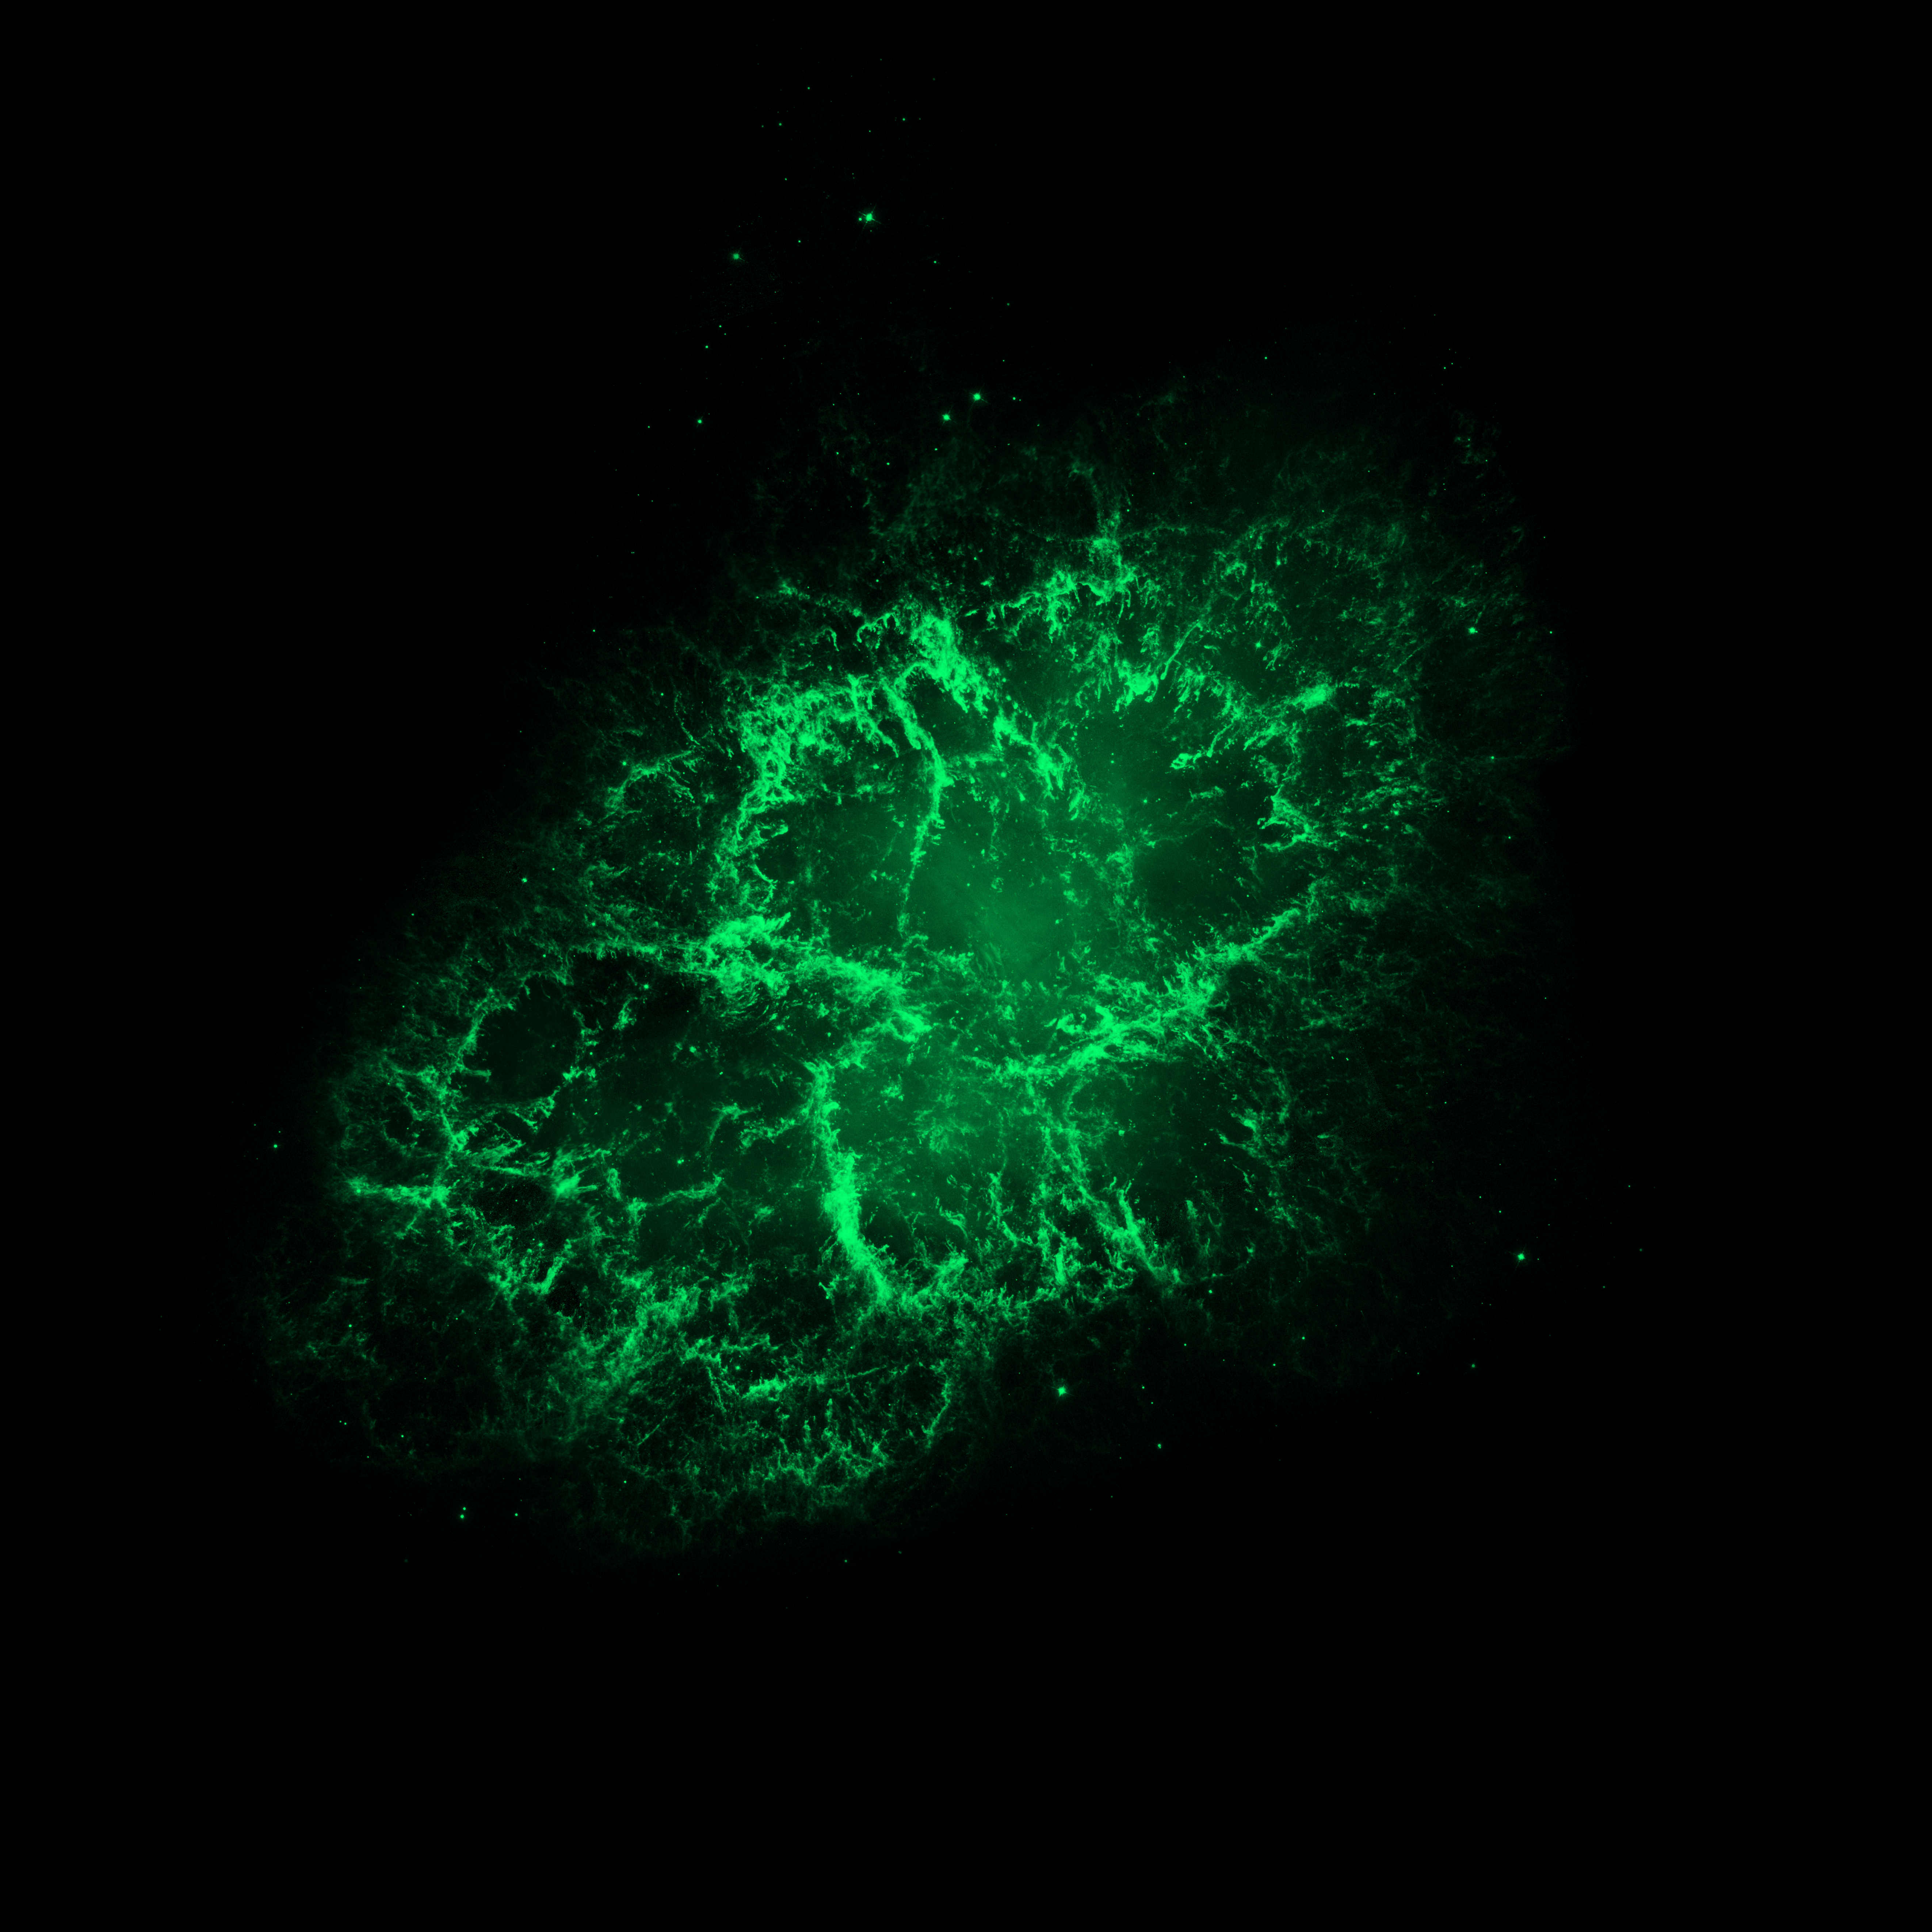

Hubble Space Telescope (visible) Image of the Crab Nebula

The NASA/ESA Hubble Space Telescope observed the Crab Nebula, a supernova remnant located 6500 light-years from Earth, in optical wavelengths.

Credit: NASA, ESA/Hubble